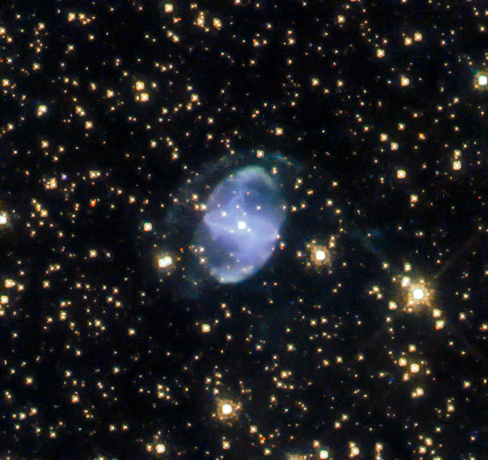

An Interstellar Distributor

The lives of planetary nebulae are often chaotic, from the death of their parent star to the scattering of its contents far out into space. Captured here by the NASA/ESA Hubble Space Telescope, ESO 455-10 is one such planetary nebula, located in the constellation of Scorpius (The Scorpion).

The oblate shells of ESO 455-10, previously held tightly together as layers of its central star, not only give this planetary nebula its unique appearance, but also offer information about the nebula. Seen in a field of stars, the distinct asymmetrical arc of material over the north side of the nebula is a clear sign of interactions between ESO 455-10 and the interstellar medium.

The interstellar medium is the material — consisting of matter and radiation — between star systems and galaxies. The star at the centre of ESO 455-10 allows Hubble to see the interaction with the gas and dust of the nebula, the surrounding interstellar medium, and the light from the star itself. Planetary nebulae are thought to be crucial in galactic enrichment as they distribute their elements, particularly the heavier metal elements produced inside a star, into the interstellar medium which will in time form the next generation of stars.

Credit: ESA/Hubble & NASA, L. Stanghellini